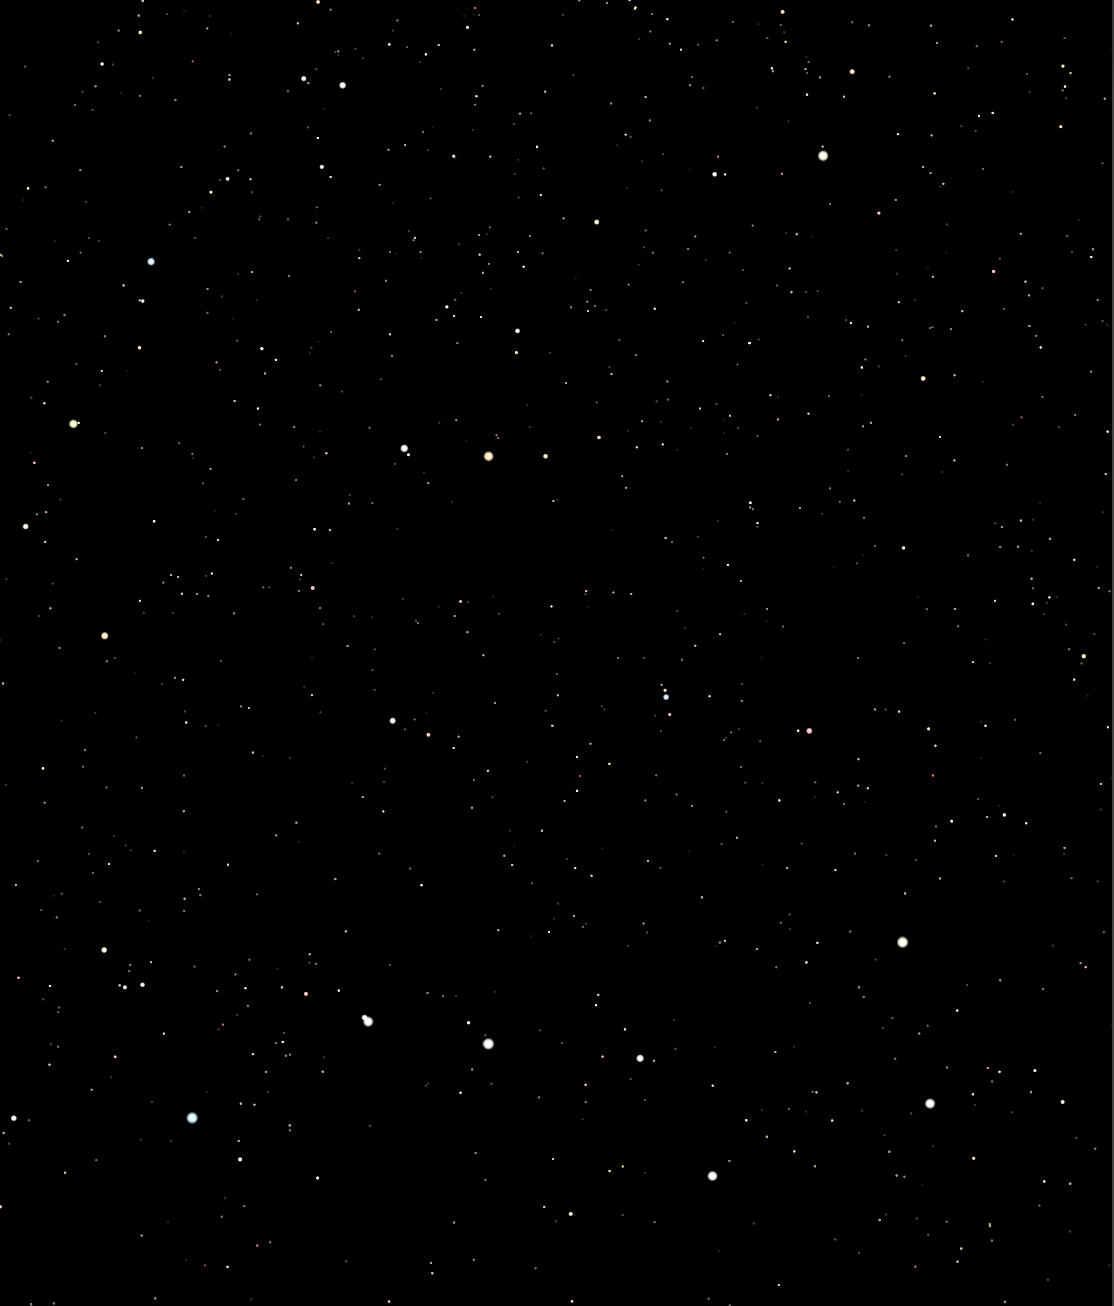

Constellation illustration

We tend to think of the North Star, Polaris, as a steady, solitary point of light that guided sailors in ages past. But there is more to the North Star than meets the eye. The North Star is actually a triple star system. And while one companion can be seen easily through small telescopes, the other hugs Polaris so tightly that it has never been seen – until now.

Credit: NASA, ESA, N. Evans (Harvard-Smithsonian CfA), and H. Bond (STScI)